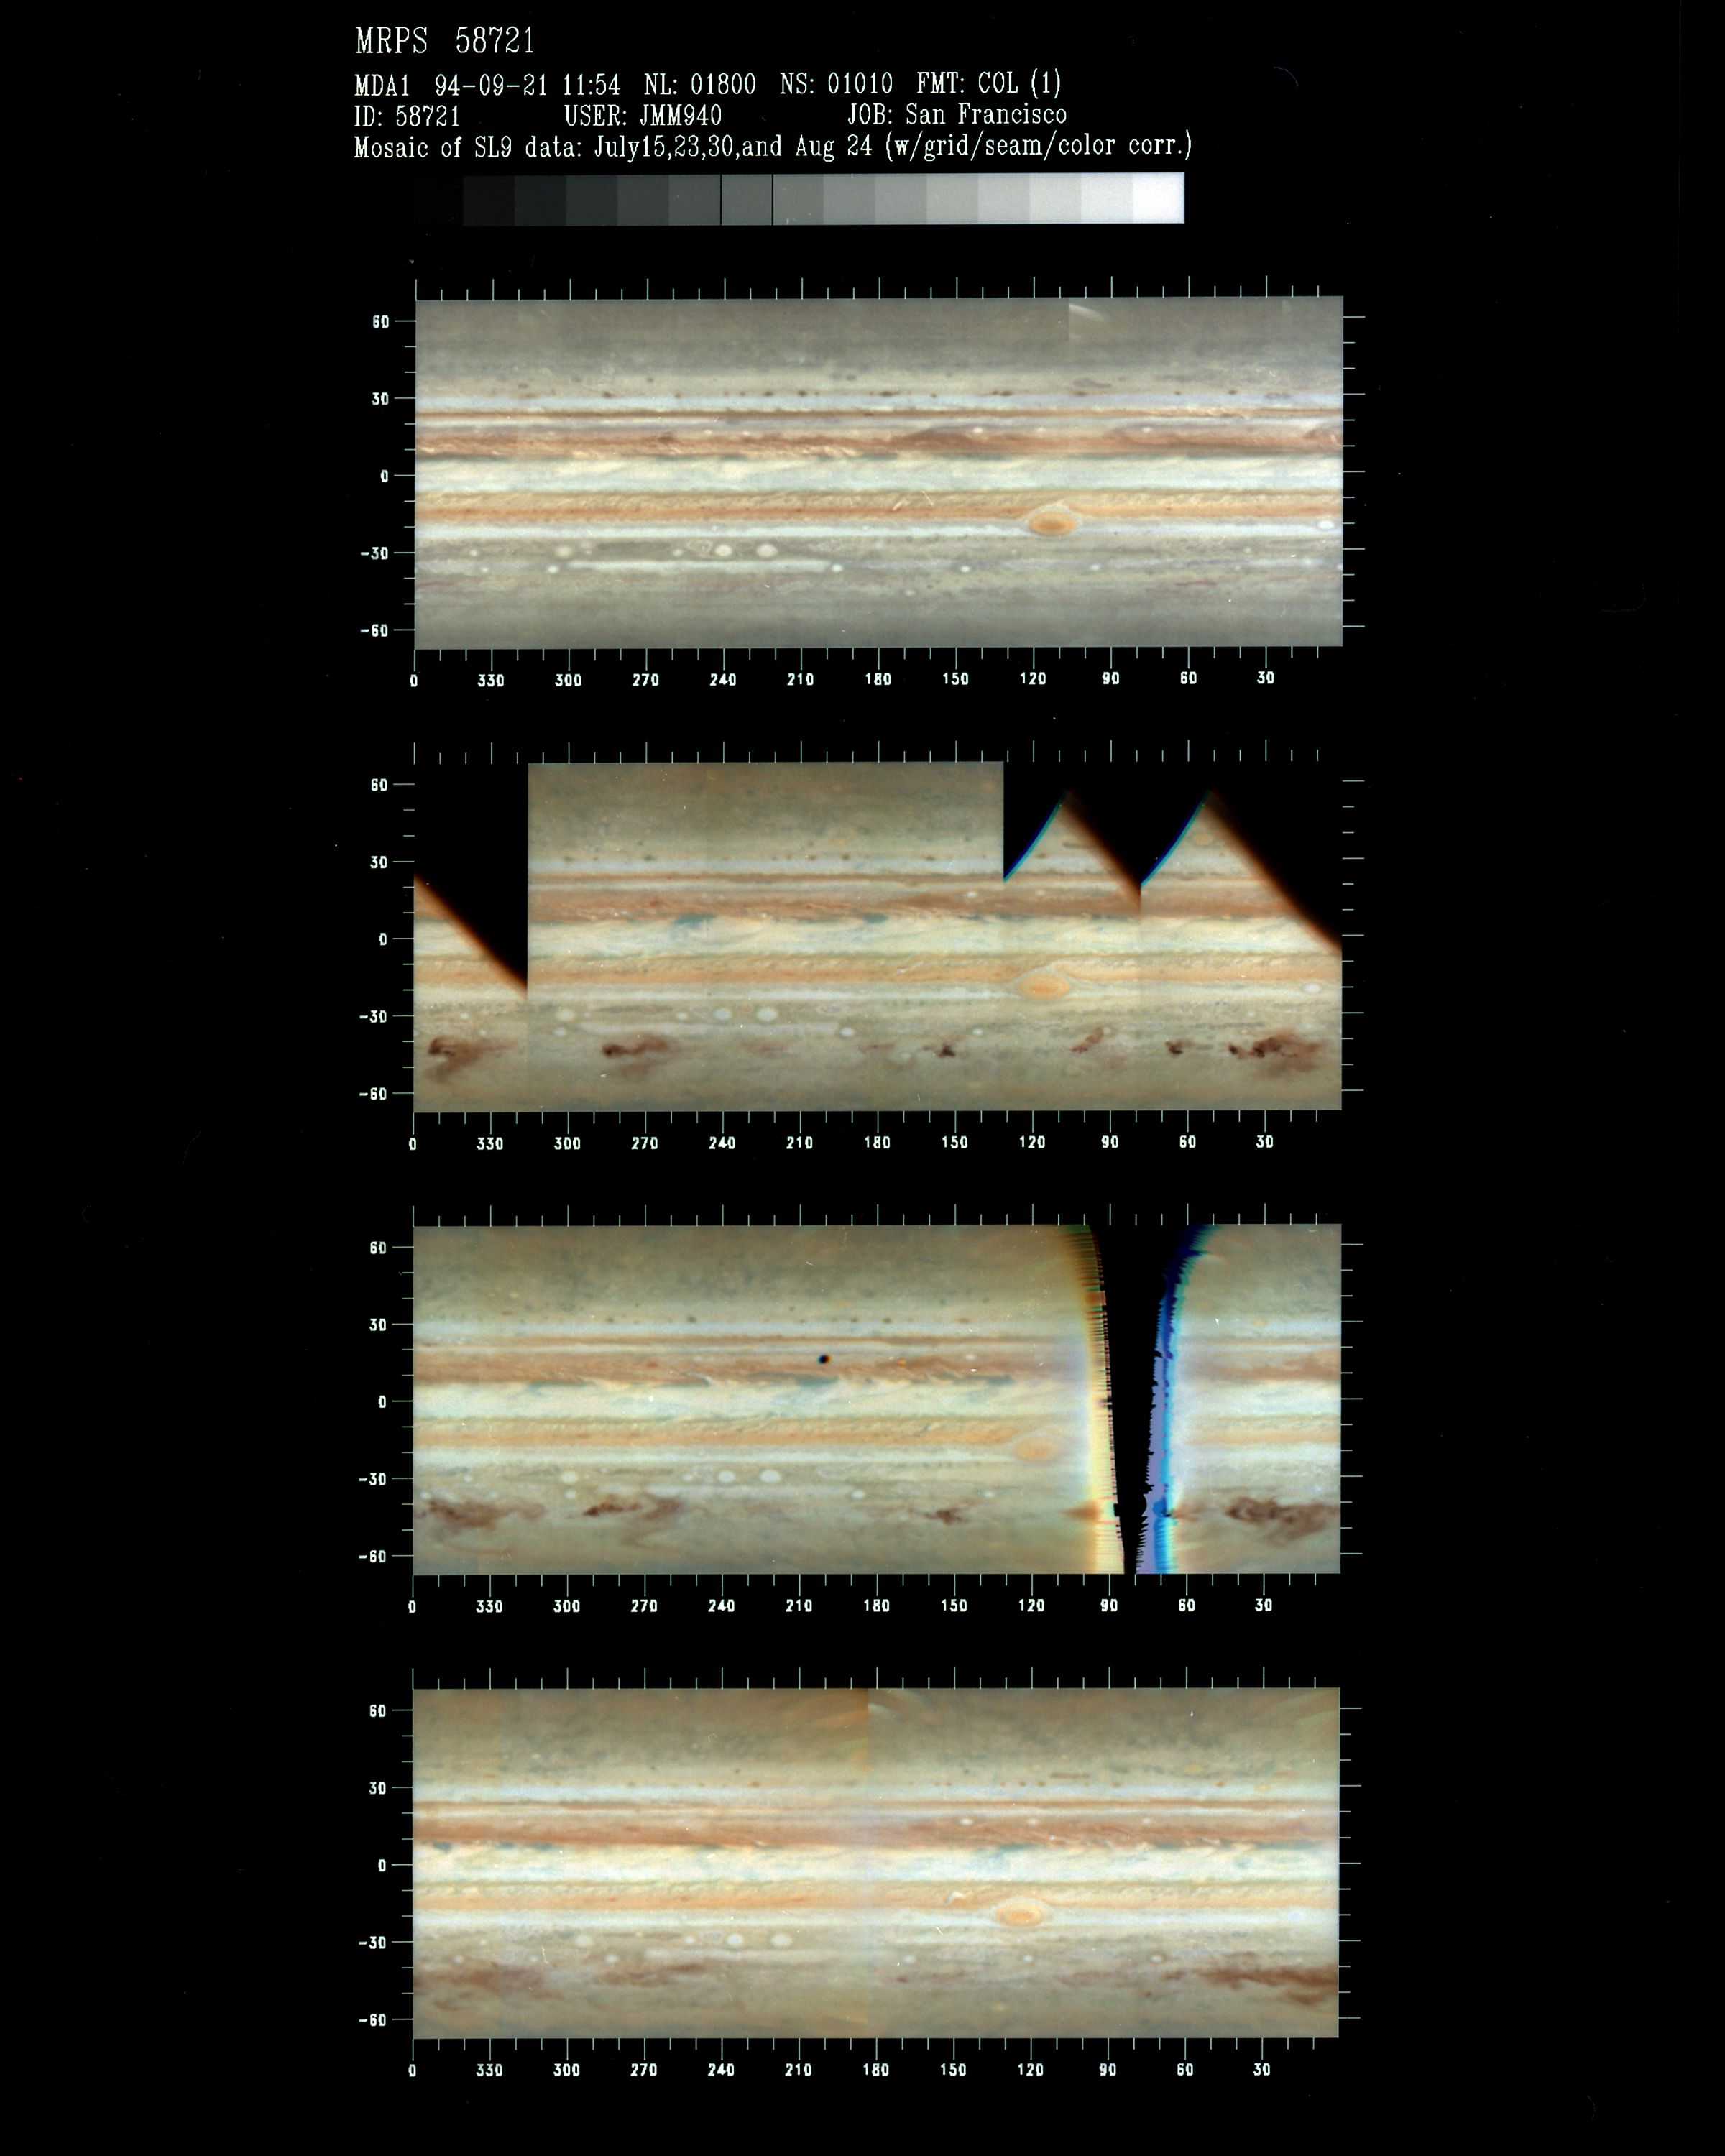

Jupiter Mapping Traces Changes in Comet P/Shoemaker-Levy 9 Impact Sites

This series of color-composite maps of Jupiter, assembled from images taken with NASA/ESA Hubble Space Telescope, allows astronomers to trace changes in the dark impact sites that resulted from the July 1994 impact of comet P/Shoemaker-Levy 9 with the giant planet. Through computer imageprocessing, researchers "peel" the atmosphere of Jupiter off its globe and spread it flat into a map. These cylindrical projections show the entire atmosphere of Jupiter in one map. The HST's images show clearly that dark material produced in the comet explosion has continued to spread in Jupiter's atmosphere. However, the "band" of dark material is still clumpy, which suggests that the major impact sites are still localized and, so, can still be identified.

Top:A pre-impact mosaic of Jupiter taken 15 July 1994 shows complex atmospheric features, zones, belts, and cells that are normal for Jupiter's dynamic weather system.

Credit: NASA & ESA